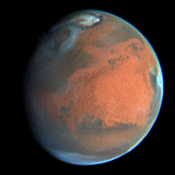

Rapid Weather Change Observed on Mars

NASA/ESA Hubble Space Telescope images of Mars obtained on July 10, 1997.

Credit: Steve Lee (Univ. Colorado), Phil James (Univ. Toledo), and Todd Clancy (Space Science Inst.)